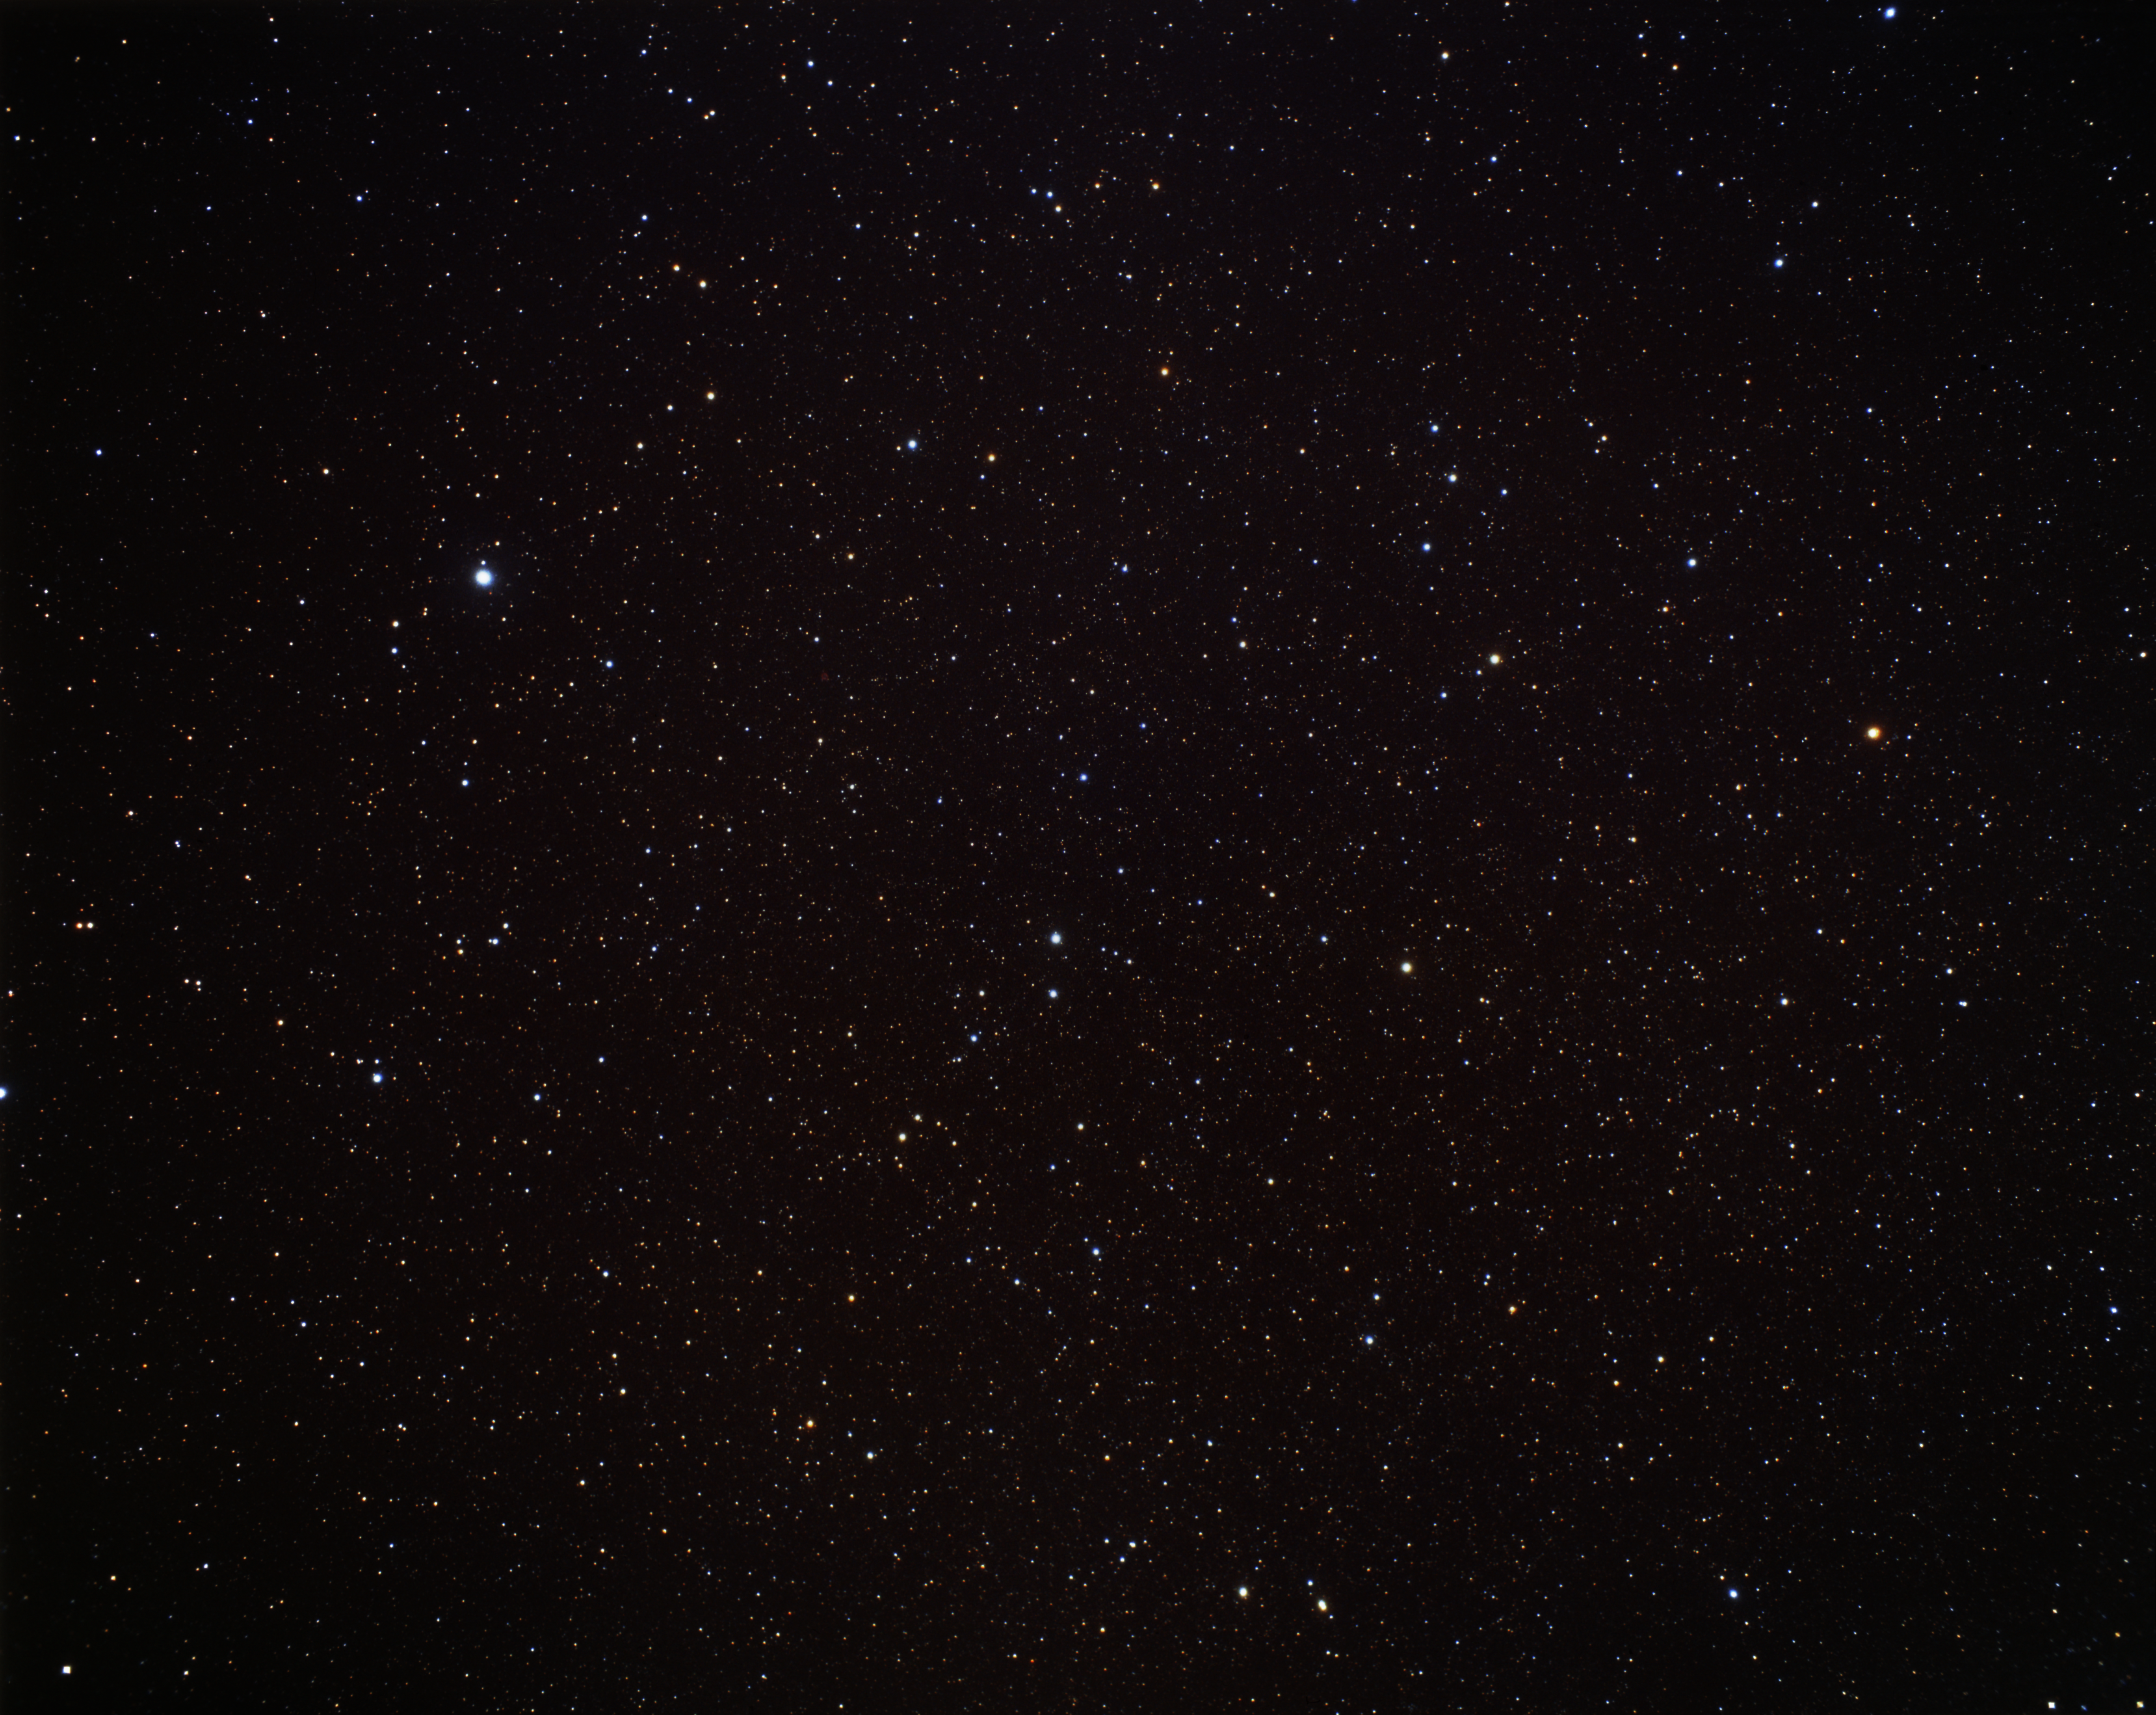

Fomalhaut and Piscis Austrinus (ground-based image)

Fomalhaut is the brightest star in this image, seen in the upper-left. Fomalhaut is much hotter than our Sun, 15 times as bright, and lies 25 light-years from Earth. It is blazing through hydrogen at such a furious rate that it will burn out in only one billion years, 10% the lifespan of our star.

Fomalhaut is located in the constellation Piscis Austrinus, the Southern Fish. Fomalhaut is the brigest star in this constellation, and is in fact one of the brightest stars in the night sky.

Credit: A. Fujii